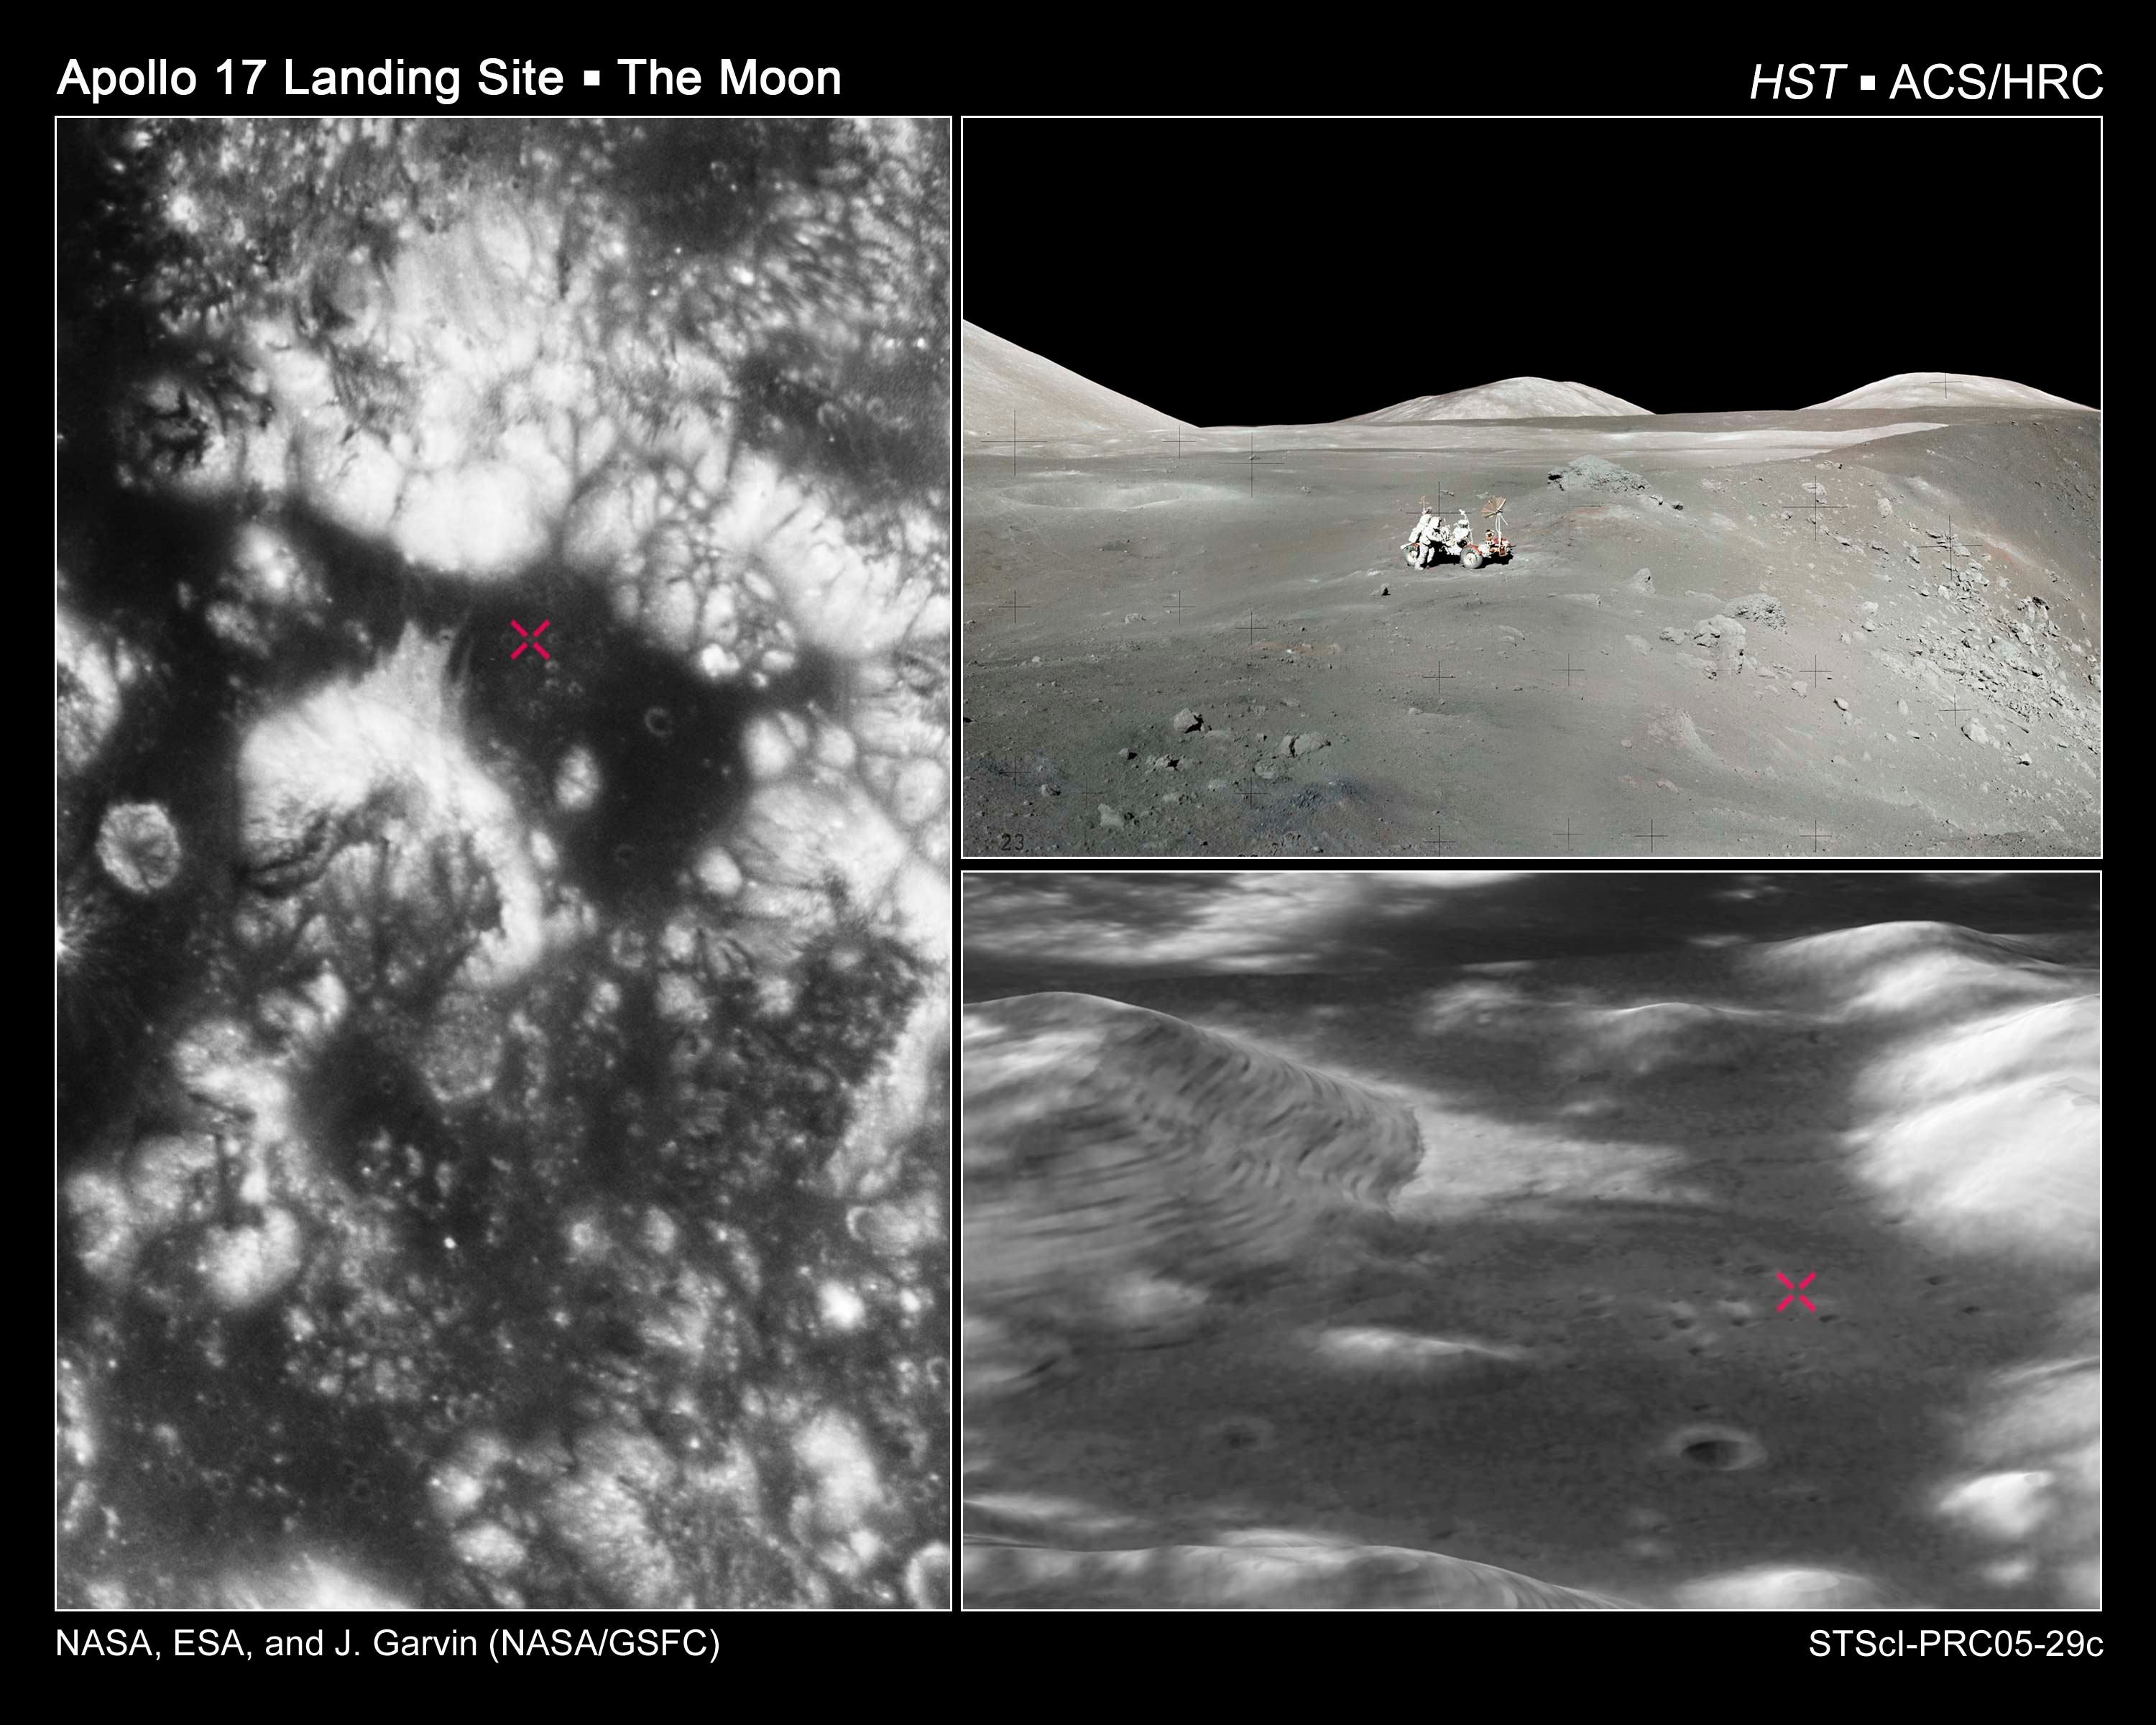

Apollo 17 landing region

This image showcases Hubble Space Telescope's first high-resolution ultraviolet and visible imaging of the Apollo 17 landing region within the Taurus-Littrow valley of the Moon. Humans last walked and drove on the lunar surface in this region (marked "+" in the image at left and at lower right) in December 1972.

Credit: NASA, ESA, and J. Garvin (NASA/GSFC)